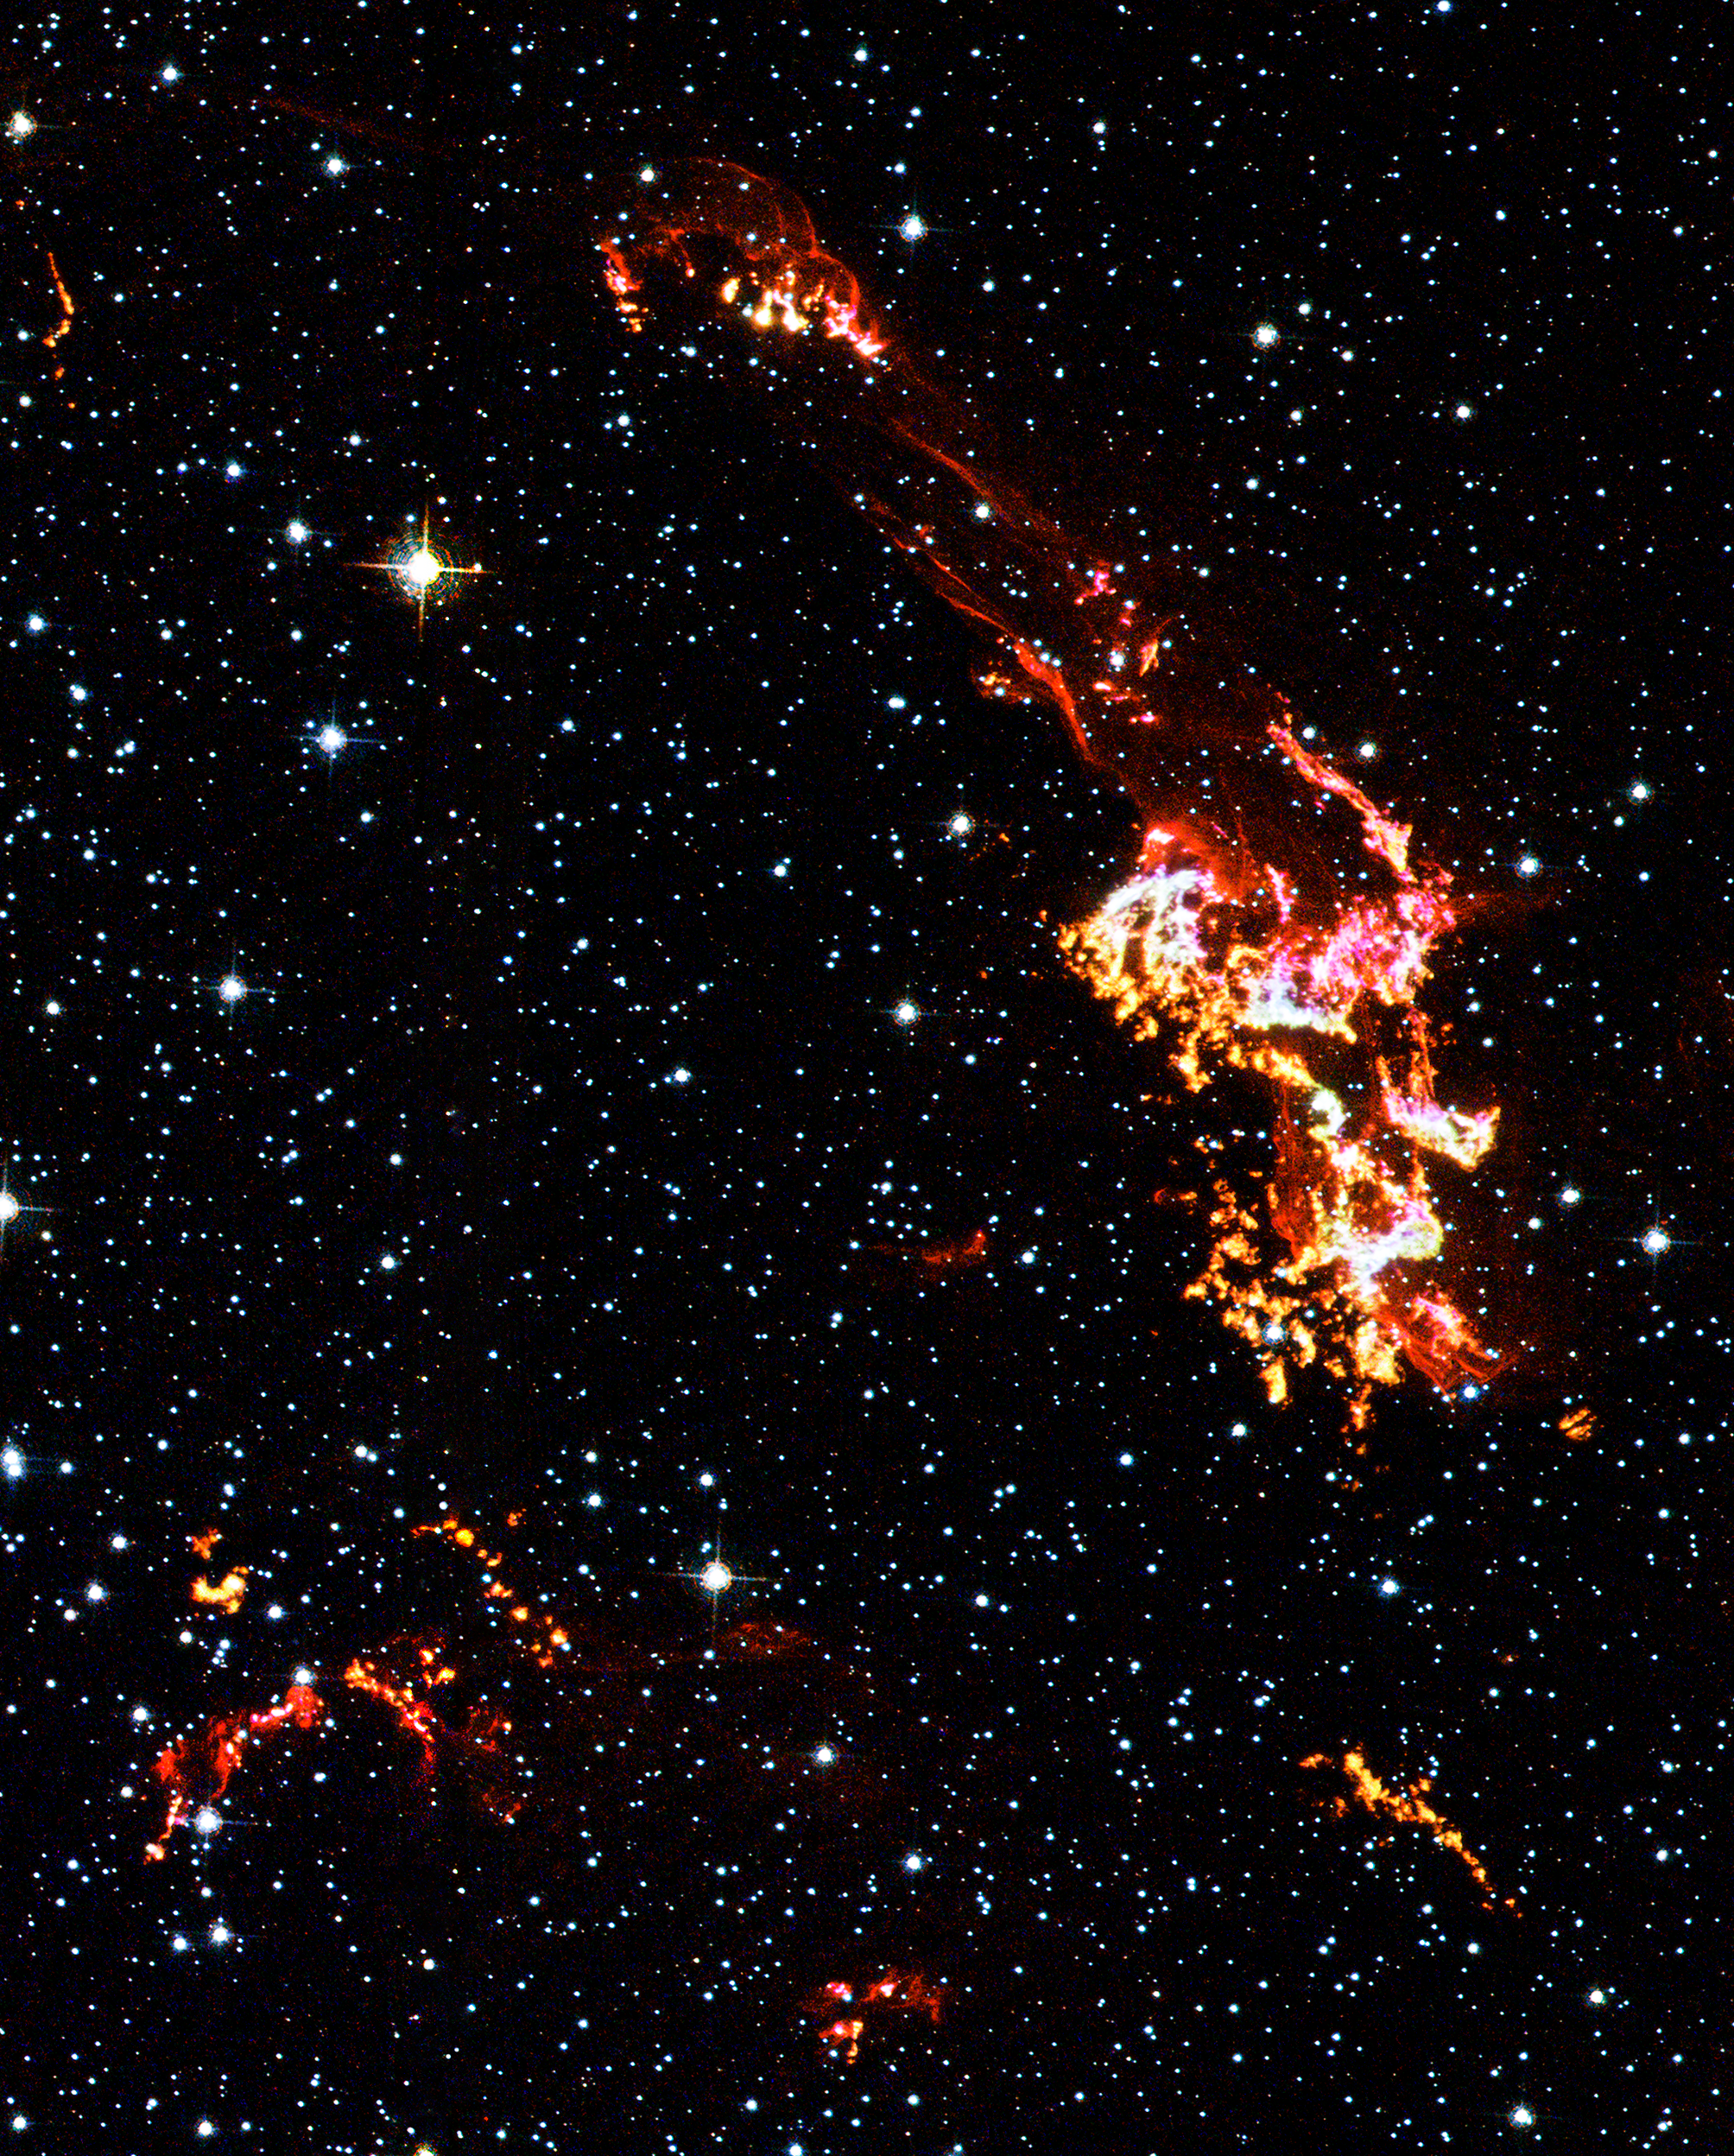

Hubble Space Telescope: Kepler's supernova remnant (close-up, visible-light data)

Four hundred years ago a "new star" appeared in the western sky, rivaling the brilliance of the nearby planets. In fact this 'new star' was a supernova, now named Kepler's supernova, and was the last such object seen to explode in our Milky Way galaxy. Seen here are some of its remains.

This image was taken with Hubble's Advanced Camera for Surveys (ACS) with filters onboard to isolate visible light emitted by hydrogen, nitrogen, and oxygen in the remnant but let through starlight from foreground and background stars. The image reveals in Kepler's supernova remnant the detailed knots, which are dense clumps that form behind the outward moving shock wave, and filamentary ribbons, which reveal where the shock wave is encountering lower-density, more uniform interstellar material.

Credit: NASA, ESA, The Hubble Heritage Team (STScI/AURA)